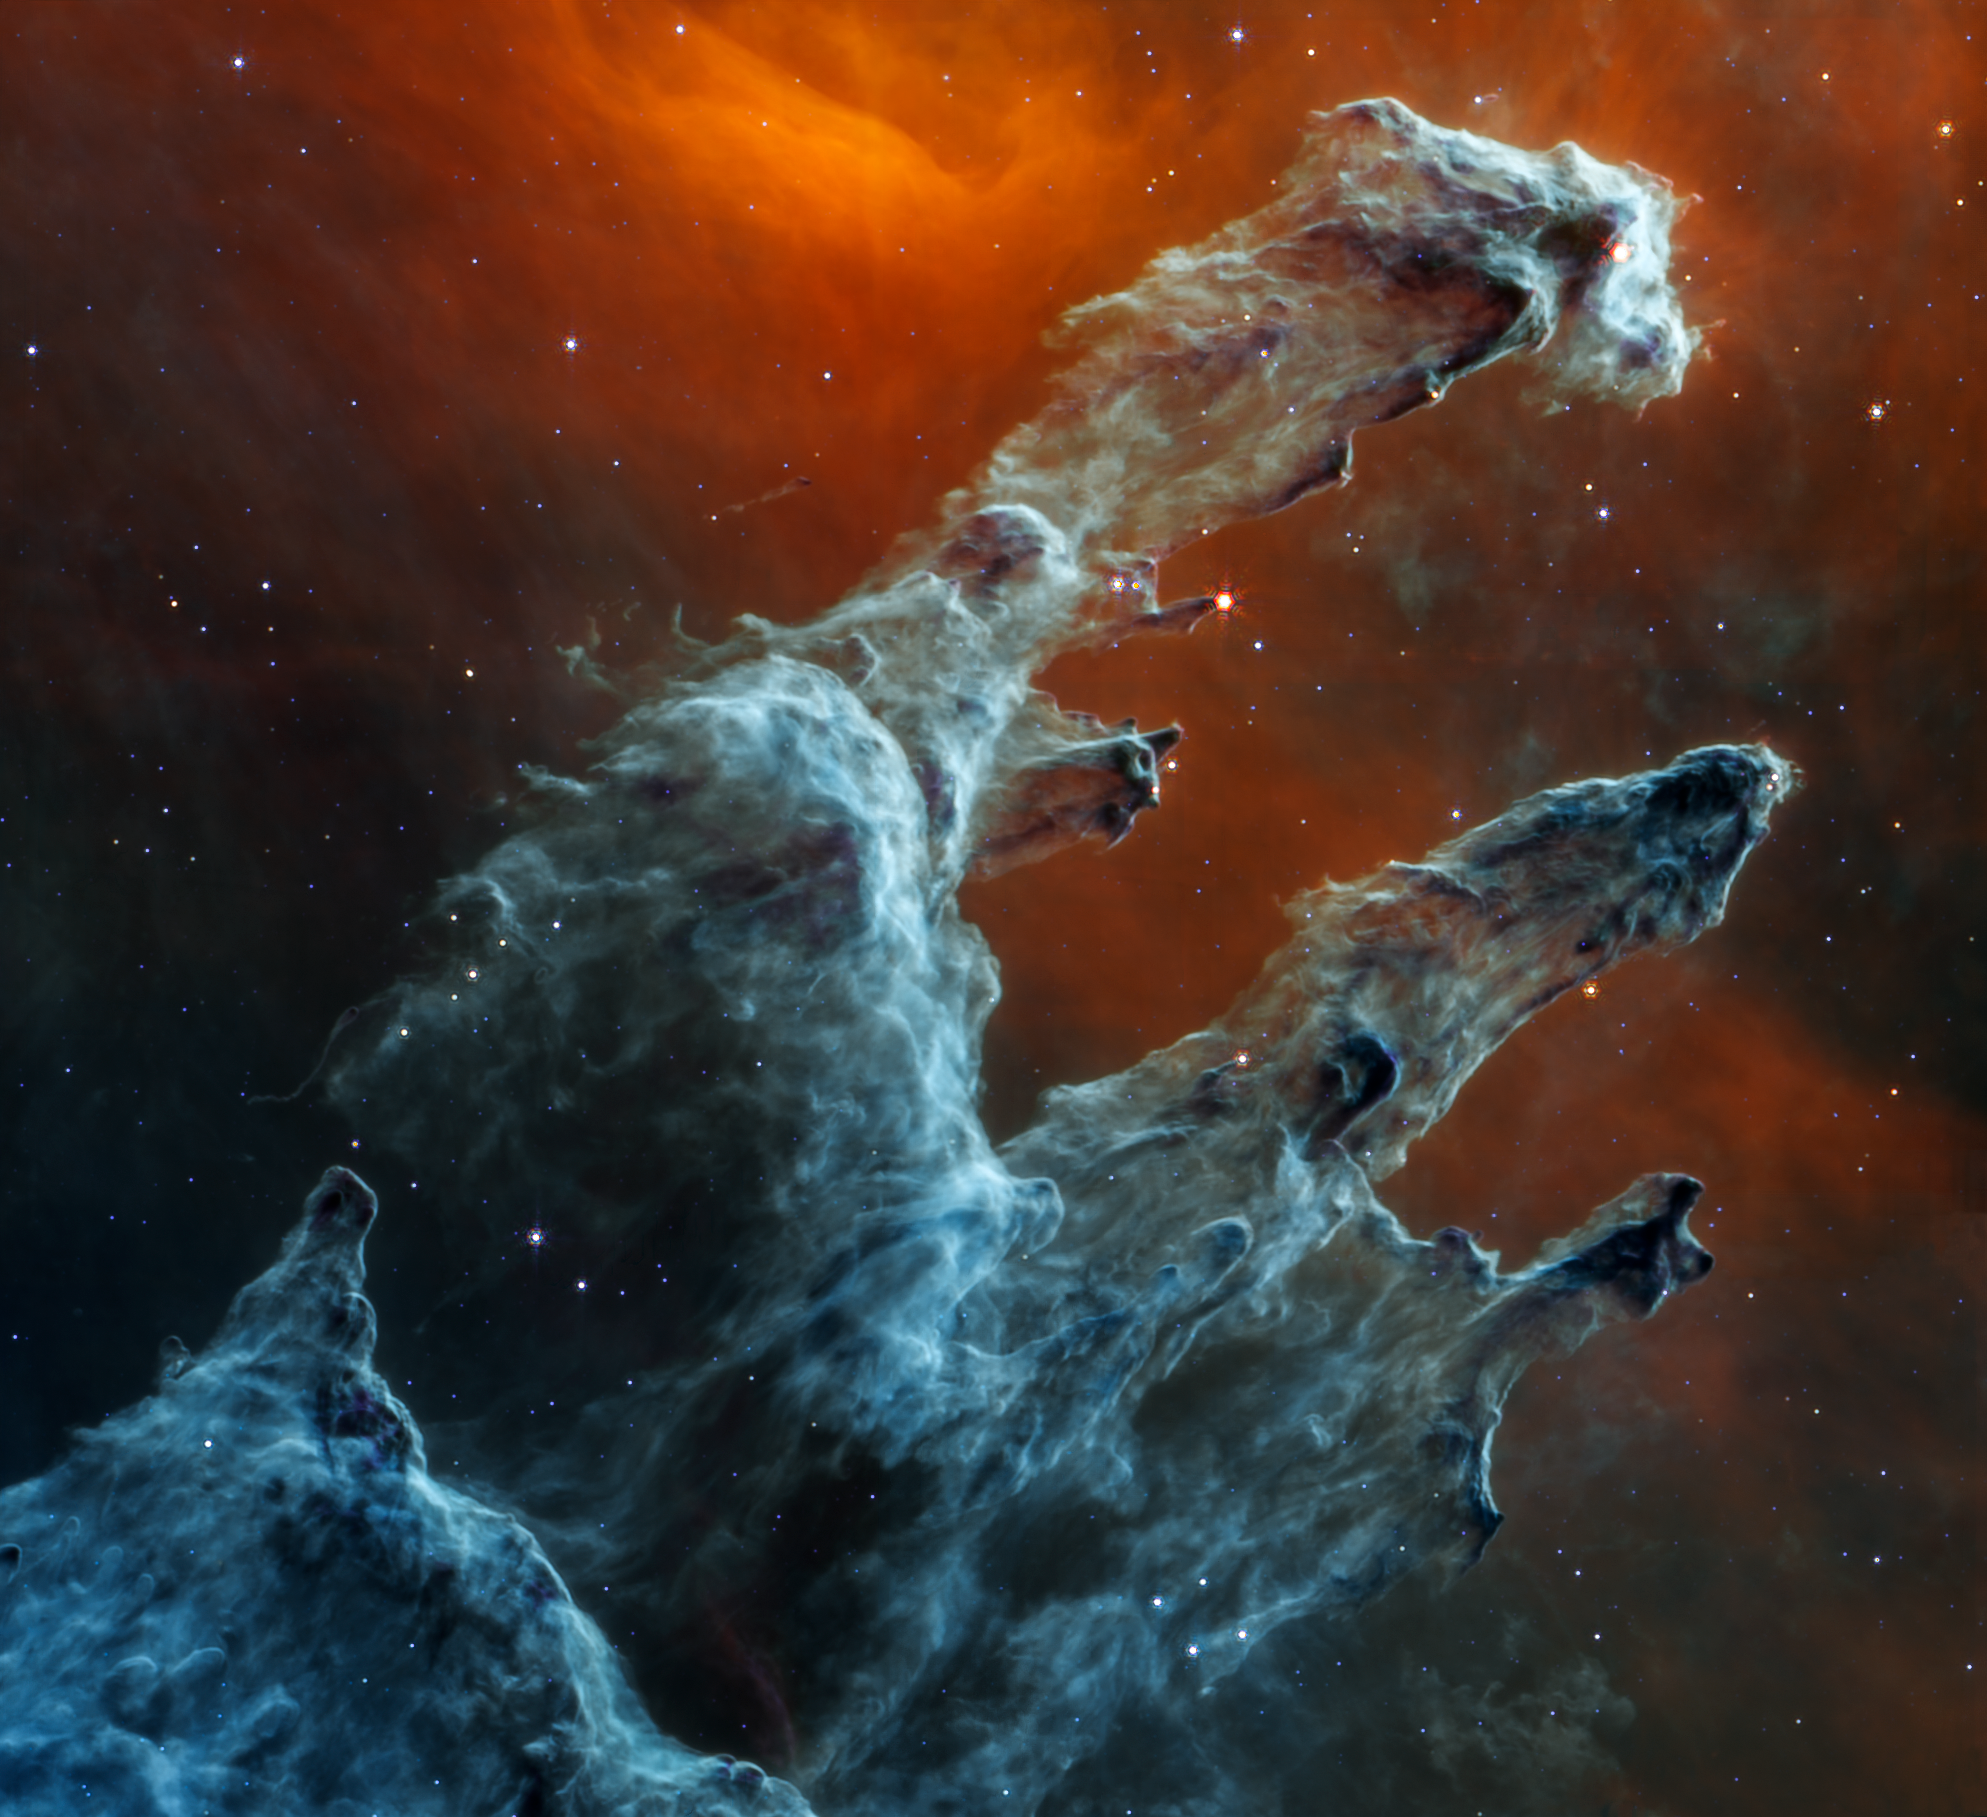

Pillars of Creation (MIRI Image)

The NASA/ESA/CSA James Webb Space Telescope’s mid-infrared view of the Pillars of Creation strikes a chilling tone. Thousands of stars that exist in this region disappear from view — and seemingly endless layers of gas and dust become the centrepiece.

The detection of dust by Webb’s Mid-Infrared Instrument (MIRI) is extremely important — dust is a major ingredient for star formation. Many stars are actively forming in these dense blue-grey pillars. When knots of gas and dust with sufficient mass form in these regions, they begin to collapse under their own gravitational attraction, slowly heat up, and eventually form new stars.

Although the stars appear to be missing, they aren’t. Stars typically do not emit much mid-infrared light. Instead, they are easiest to detect in ultraviolet, visible, and near-infrared light. In this MIRI view, two types of stars can be identified. The stars at the end of the thick, dusty pillars have recently eroded most of the more distant material surrounding them but they can be seen in mid-infrared light because they are still surrounded by cloaks of dust. In contrast, blue tones indicate stars that are older and have shed most of their gas and dust.

Mid-infrared light also details dense regions of gas and dust. The red region toward the top, which forms a delicate V shape, is where the dust is both diffuse and cooler. And although it may seem like the scene clears toward the bottom left of this view, the darkest grey areas are where densest and coolest regions of dust lie. Notice that there are many fewer stars and no background galaxies popping into view.

Webb’s mid-infrared data will help researchers determine exactly how much dust is in this region — and what it’s made of. These details will make models of the Pillars of Creation far more precise. Over time, we will begin to understand more clearly how stars form and burst out of these dusty clouds over millions of years.

Contrast this view with Webb’s near-infrared light image.

MIRI was contributed by ESA and NASA, with the instrument designed and built by a consortium of nationally funded European Institutes (The MIRI European Consortium) in partnership with JPL and the University of Arizona.

Credit: NASA, ESA, CSA, STScI, J. DePasquale (STScI), A. Pagan (STScI)